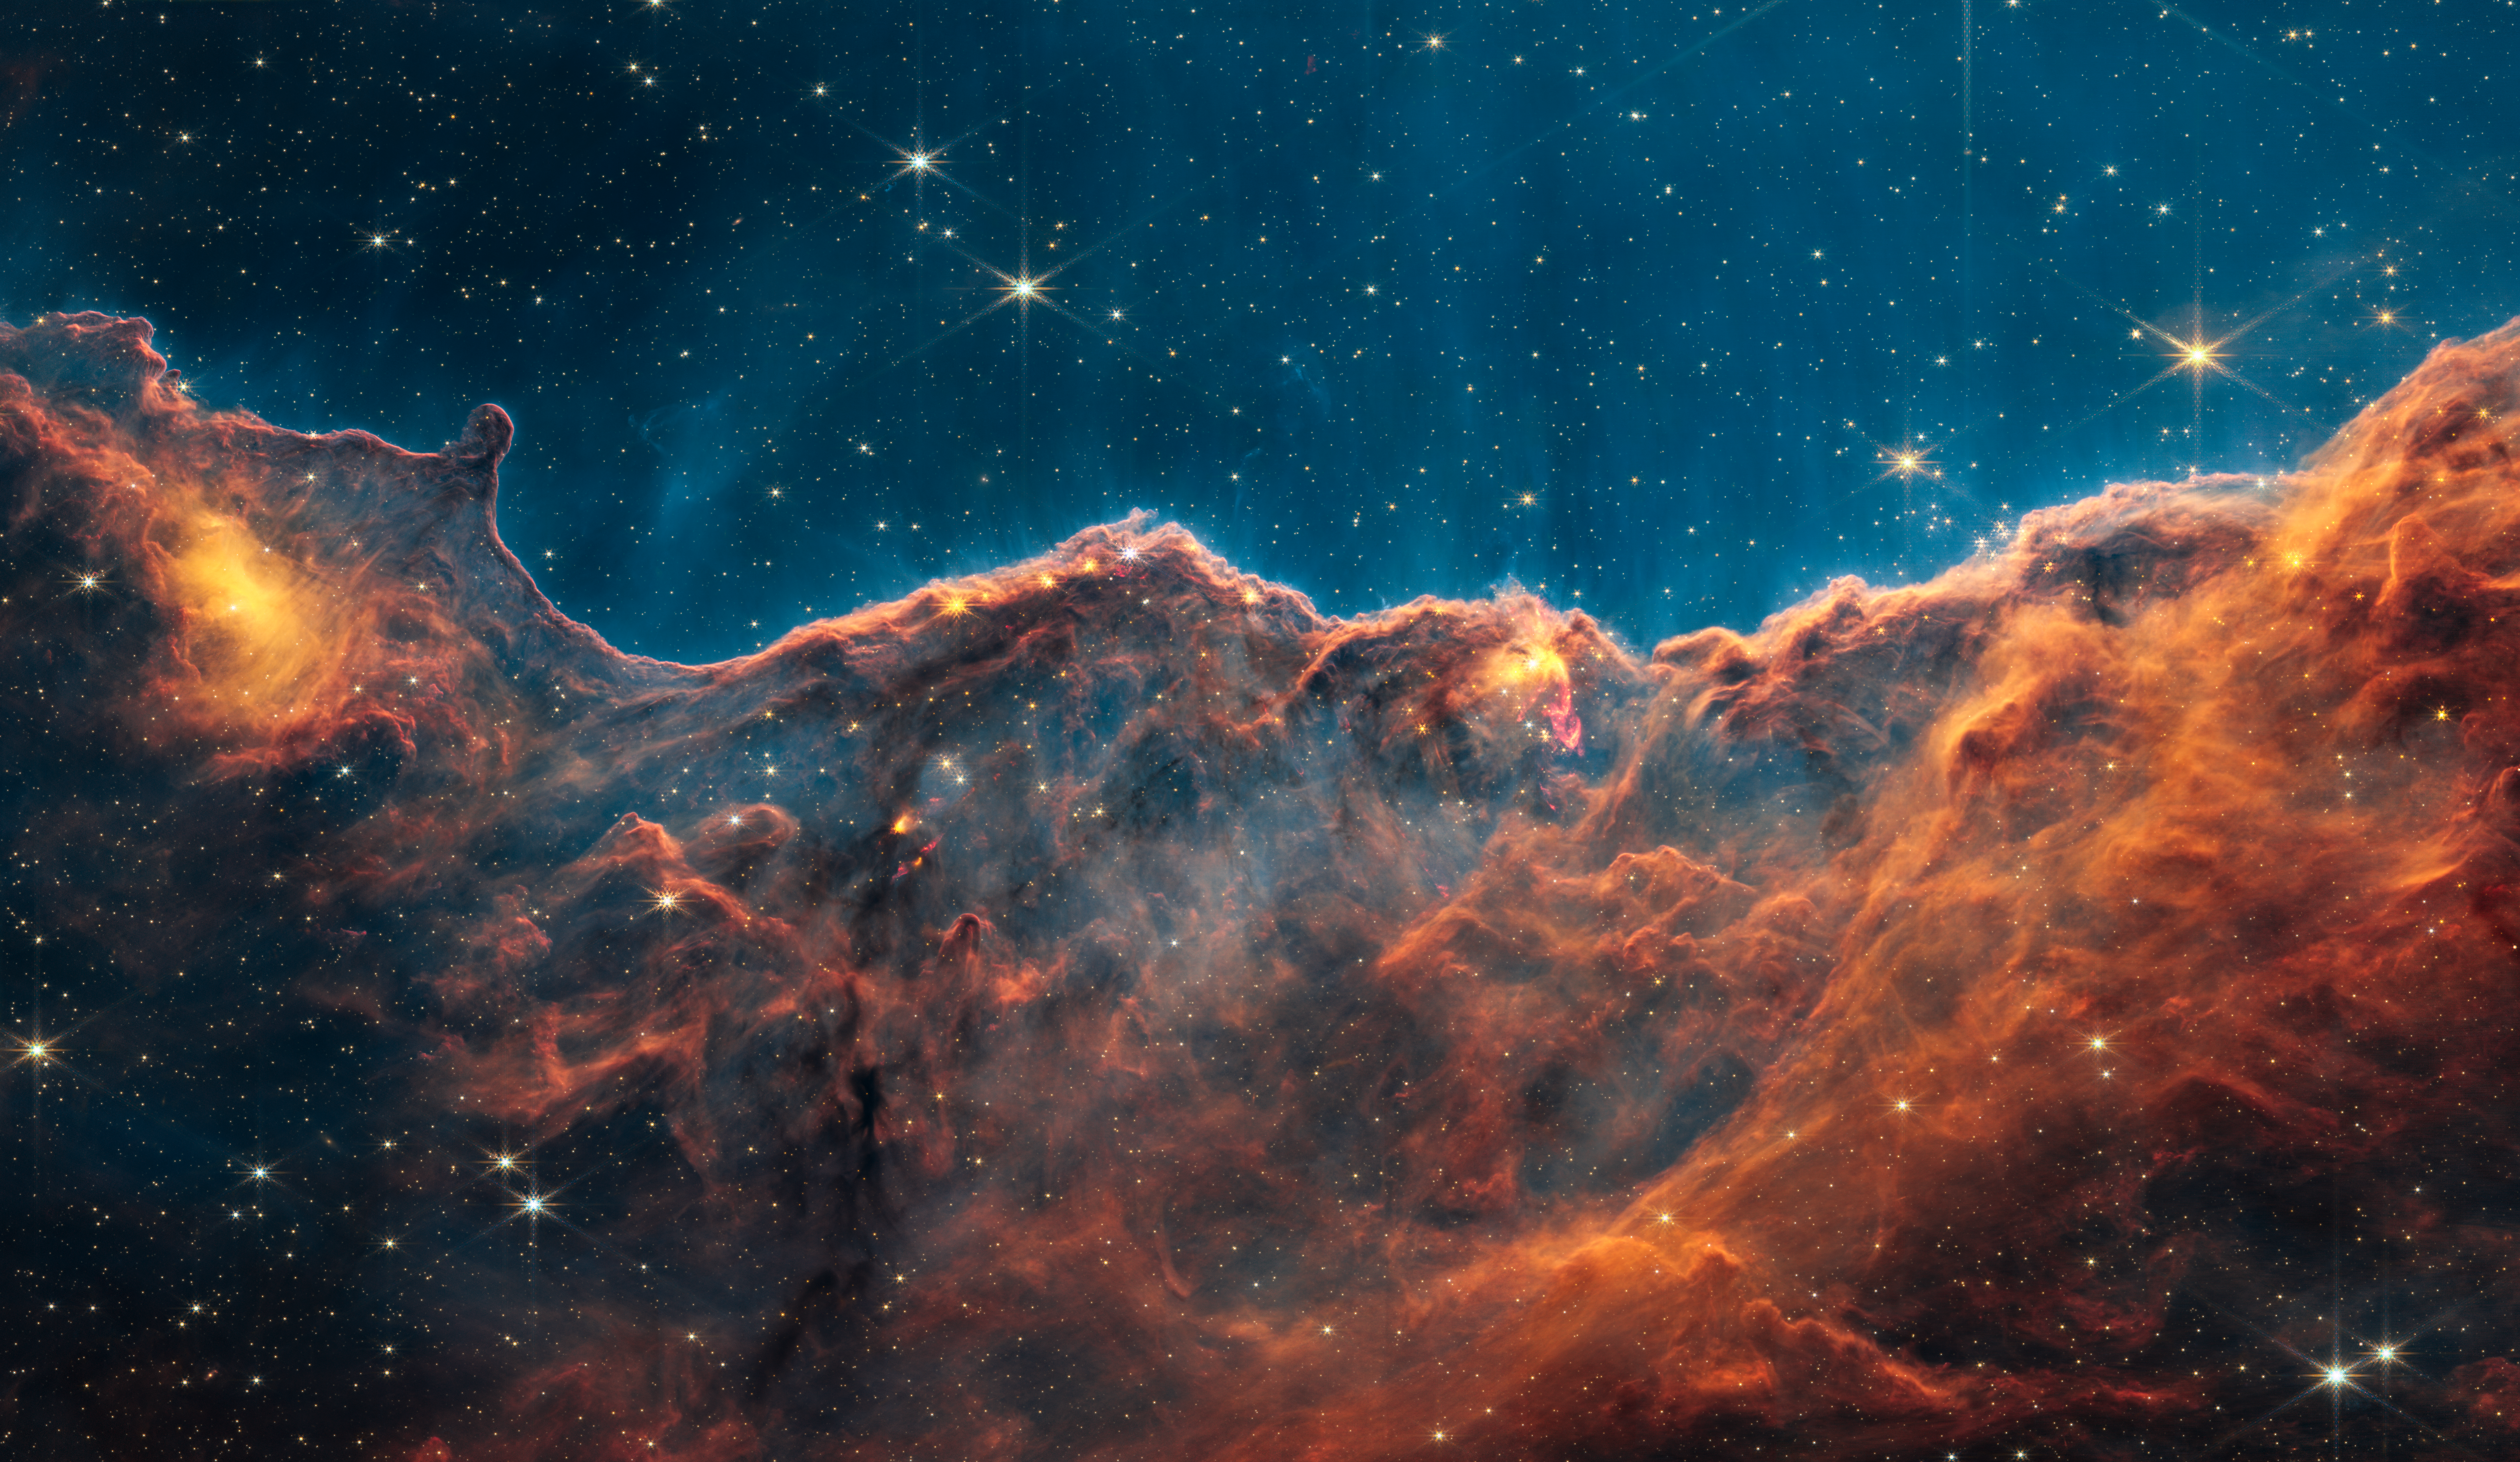

Carina Nebula Jets (NIRCam Narrowband Filters)

Scientists taking a “deep dive” into one of the iconic first images from the NASA/ESA/CSA James Webb Space Telescope have discovered dozens of energetic jets and outflows from young stars previously hidden by dust clouds. The discovery marks the beginning of a new era of investigating how stars like our Sun form, and how the radiation from nearby massive stars might affect the development of planets.

Dozens of previously hidden jets and outflows from young stars are revealed in this new image from Webb’s Near-Infrared Camera (NIRCam). This image separates out several wavelengths of light from the First Image revealed on 12 July 2022, which highlights molecular hydrogen, a vital ingredient for star formation.

The Cosmic Cliffs, a region at the edge of a gigantic, gaseous cavity within the star cluster NGC 3324, has long intrigued astronomers as a hotbed for star formation. While well-studied by the NASA/ESA Hubble Space Telescope, many details of star formation in NGC 3324 remain hidden at visible-light wavelengths. Webb is perfectly primed to tease out these long-sought-after details since it is built to detect jets and outflows seen only in the infrared at high resolution. Webb’s capabilities also allow researchers to track the movement of other features previously captured by Hubble.

Recently, by analyzing data from a specific wavelength of infrared light (4.7 microns), astronomers discovered two dozen previously unknown outflows from extremely young stars revealed by molecular hydrogen. Webb’s observations uncovered a gallery of objects ranging from small fountains to burbling behemoths that extend light-years from the forming stars. Many of these protostars are poised to become low mass stars, like our Sun.

Molecular hydrogen is a vital ingredient for making new stars and an excellent tracer of the early stages of their formation. As young stars gather material from the gas and dust that surround them, most also eject a fraction of that material back out again from their polar regions in jets and outflows. These jets then act like a snowplow, bulldozing into the surrounding environment. Visible in Webb’s observations is the molecular hydrogen getting swept up and excited by these jets.

Previous observations of jets and outflows looked mostly at nearby regions and more evolved objects that are already detectable in the visual wavelengths seen by Hubble. The unparalleled sensitivity of Webb allows observations of more distant regions, while its infrared optimization probes into the dust-sampling younger stages. Together this provides astronomers with an unprecedented view into environments that resemble the birthplace of our solar system.

In analyzing the new Webb observations, astronomers are also gaining insights into how active these star-forming regions are, even in a relatively short time span. By comparing the position of previously known outflows in this region caught by Webb, to archival data by Hubble from 16 years ago, the scientists were able to track the speed and direction in which the jets are moving.

This science was conducted on observations collected as part of Webb’s Early Release Observations Program. The paper was published in the Monthly Notices of the Royal Astronomical Society in December 2022.

In this image, red, green, and blue were assigned to Webb’s NIRCam data at 4.7, 4.44, and 1.87 microns (F470N, F444W, and F187N filters, respectively).

Credit: NASA, ESA, CSA, and STScI, J. DePasquale (STScI)